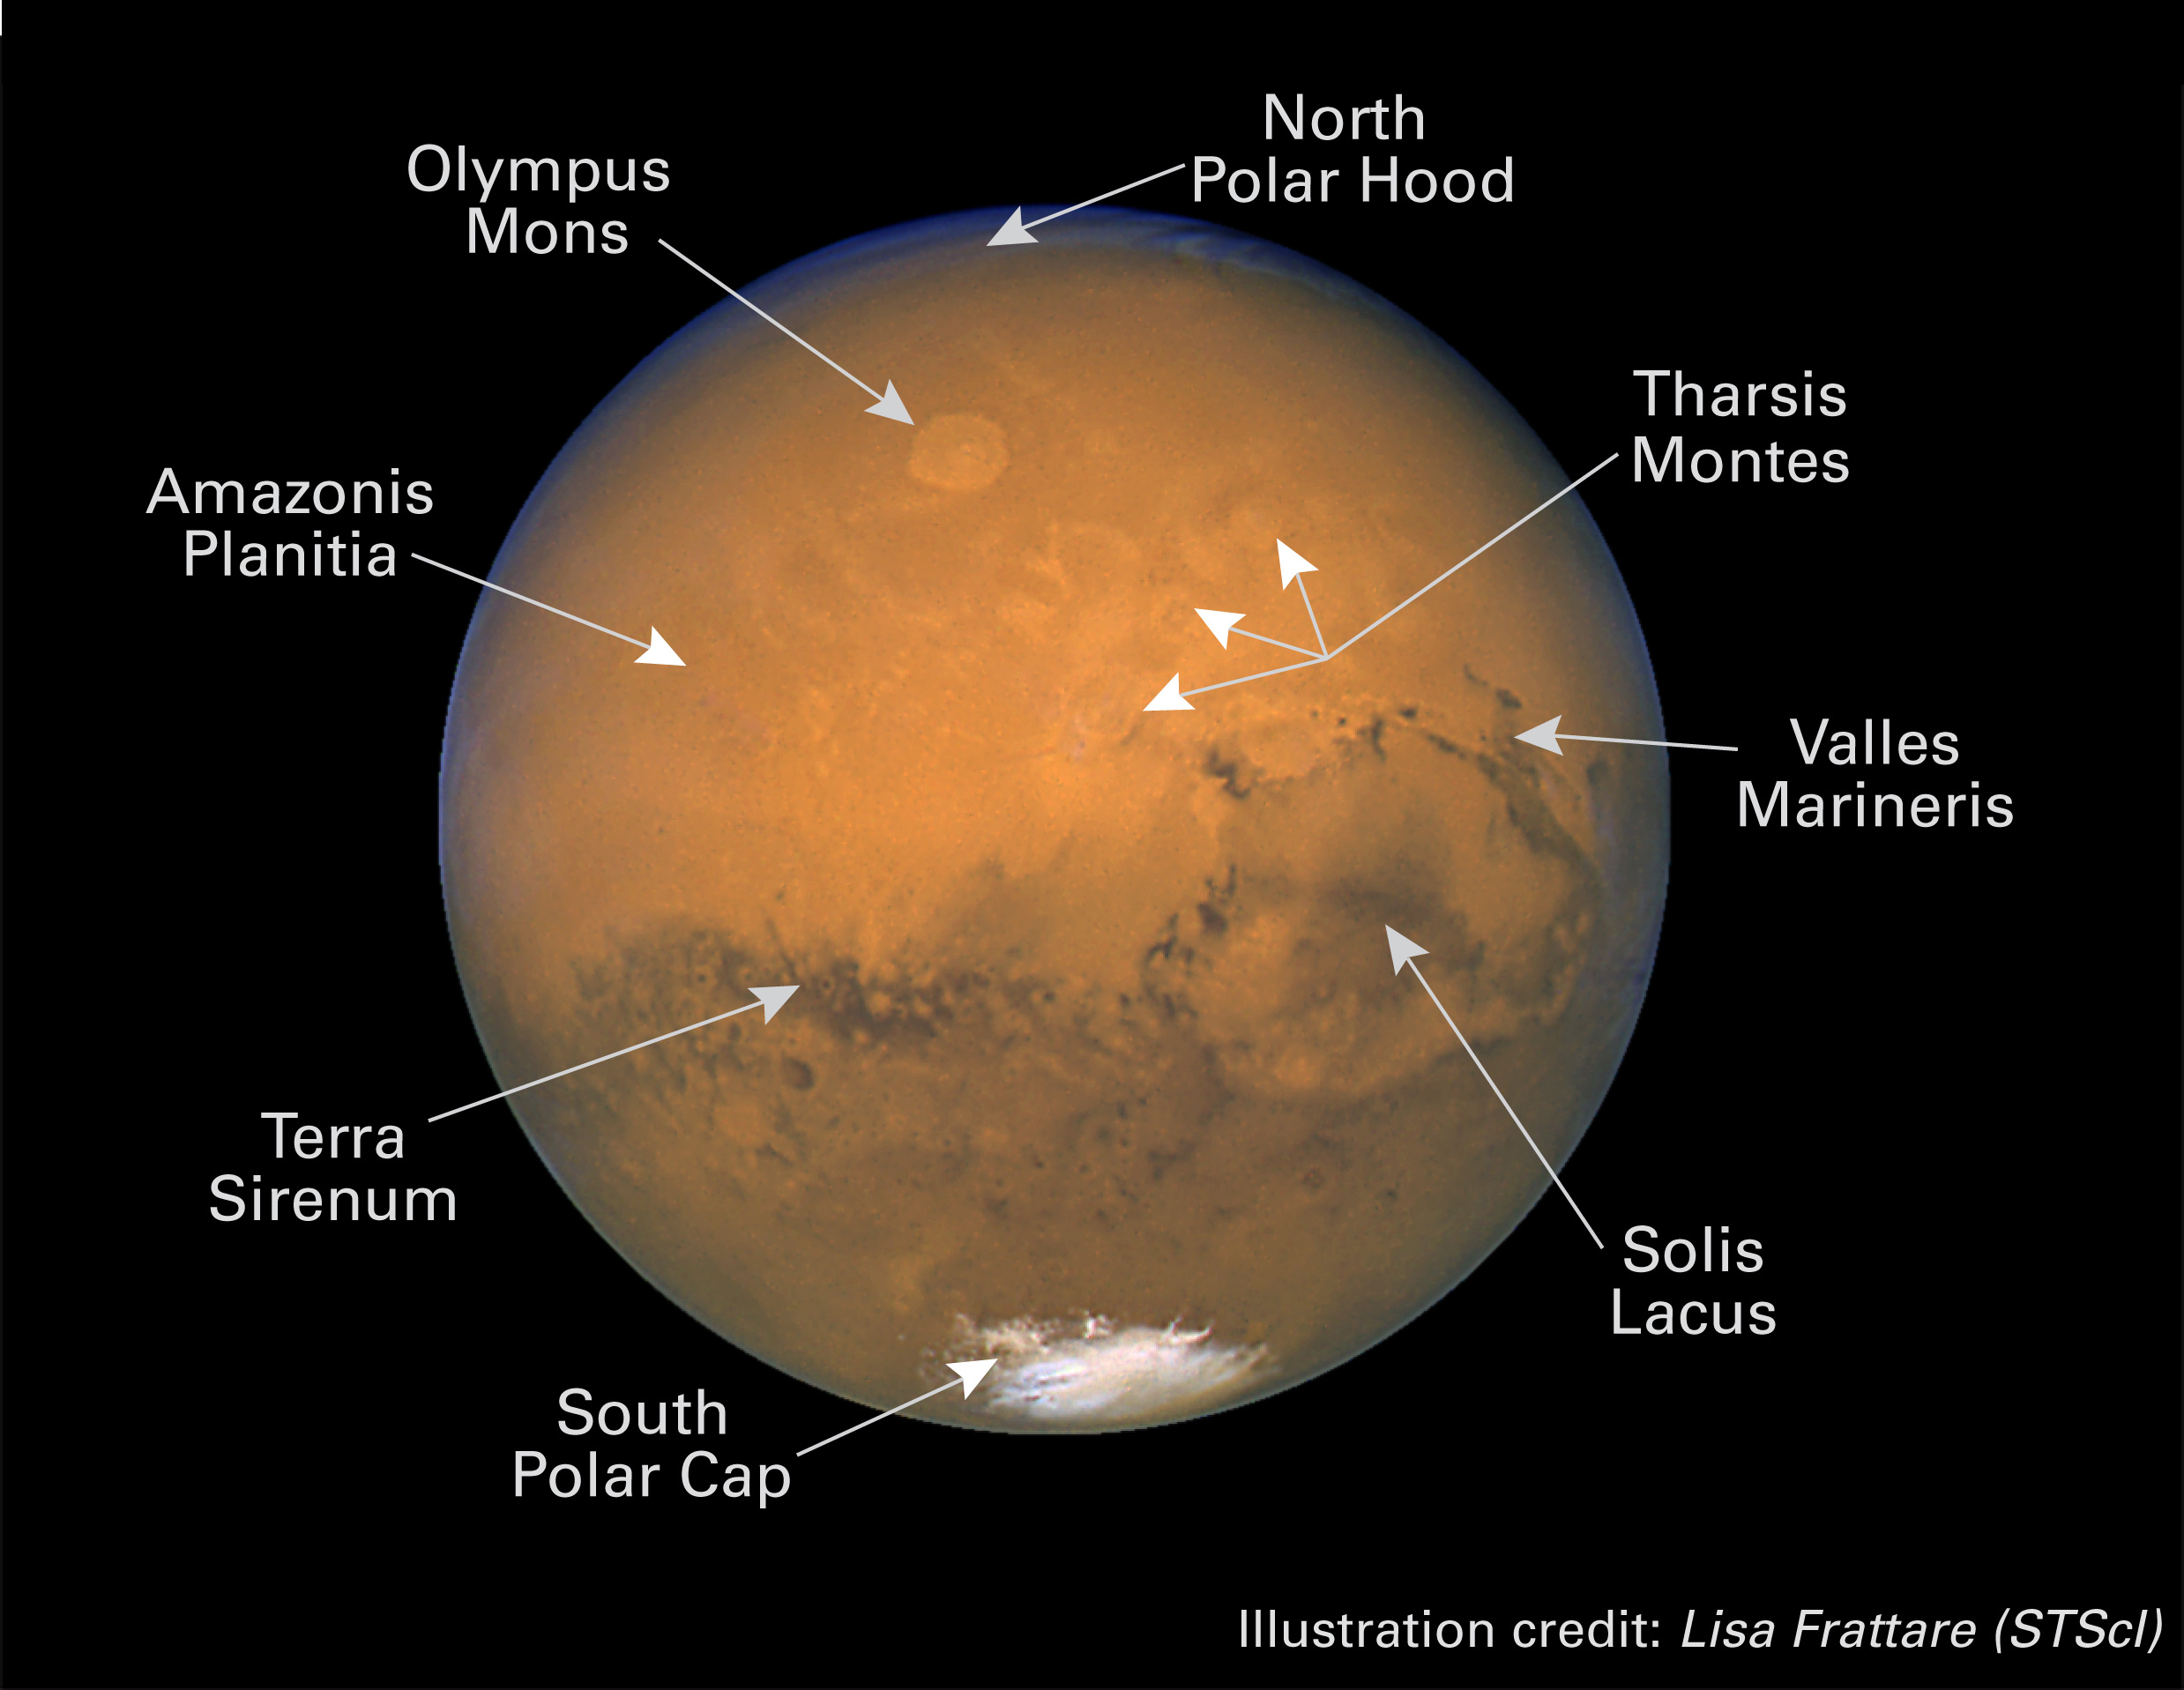

Mars anotated: next view

Why does Mars have a rusty orange colour? The planet's surface is colored by iron oxide.

Credit: NASA/ESA and Lisa Frattare (STScI)